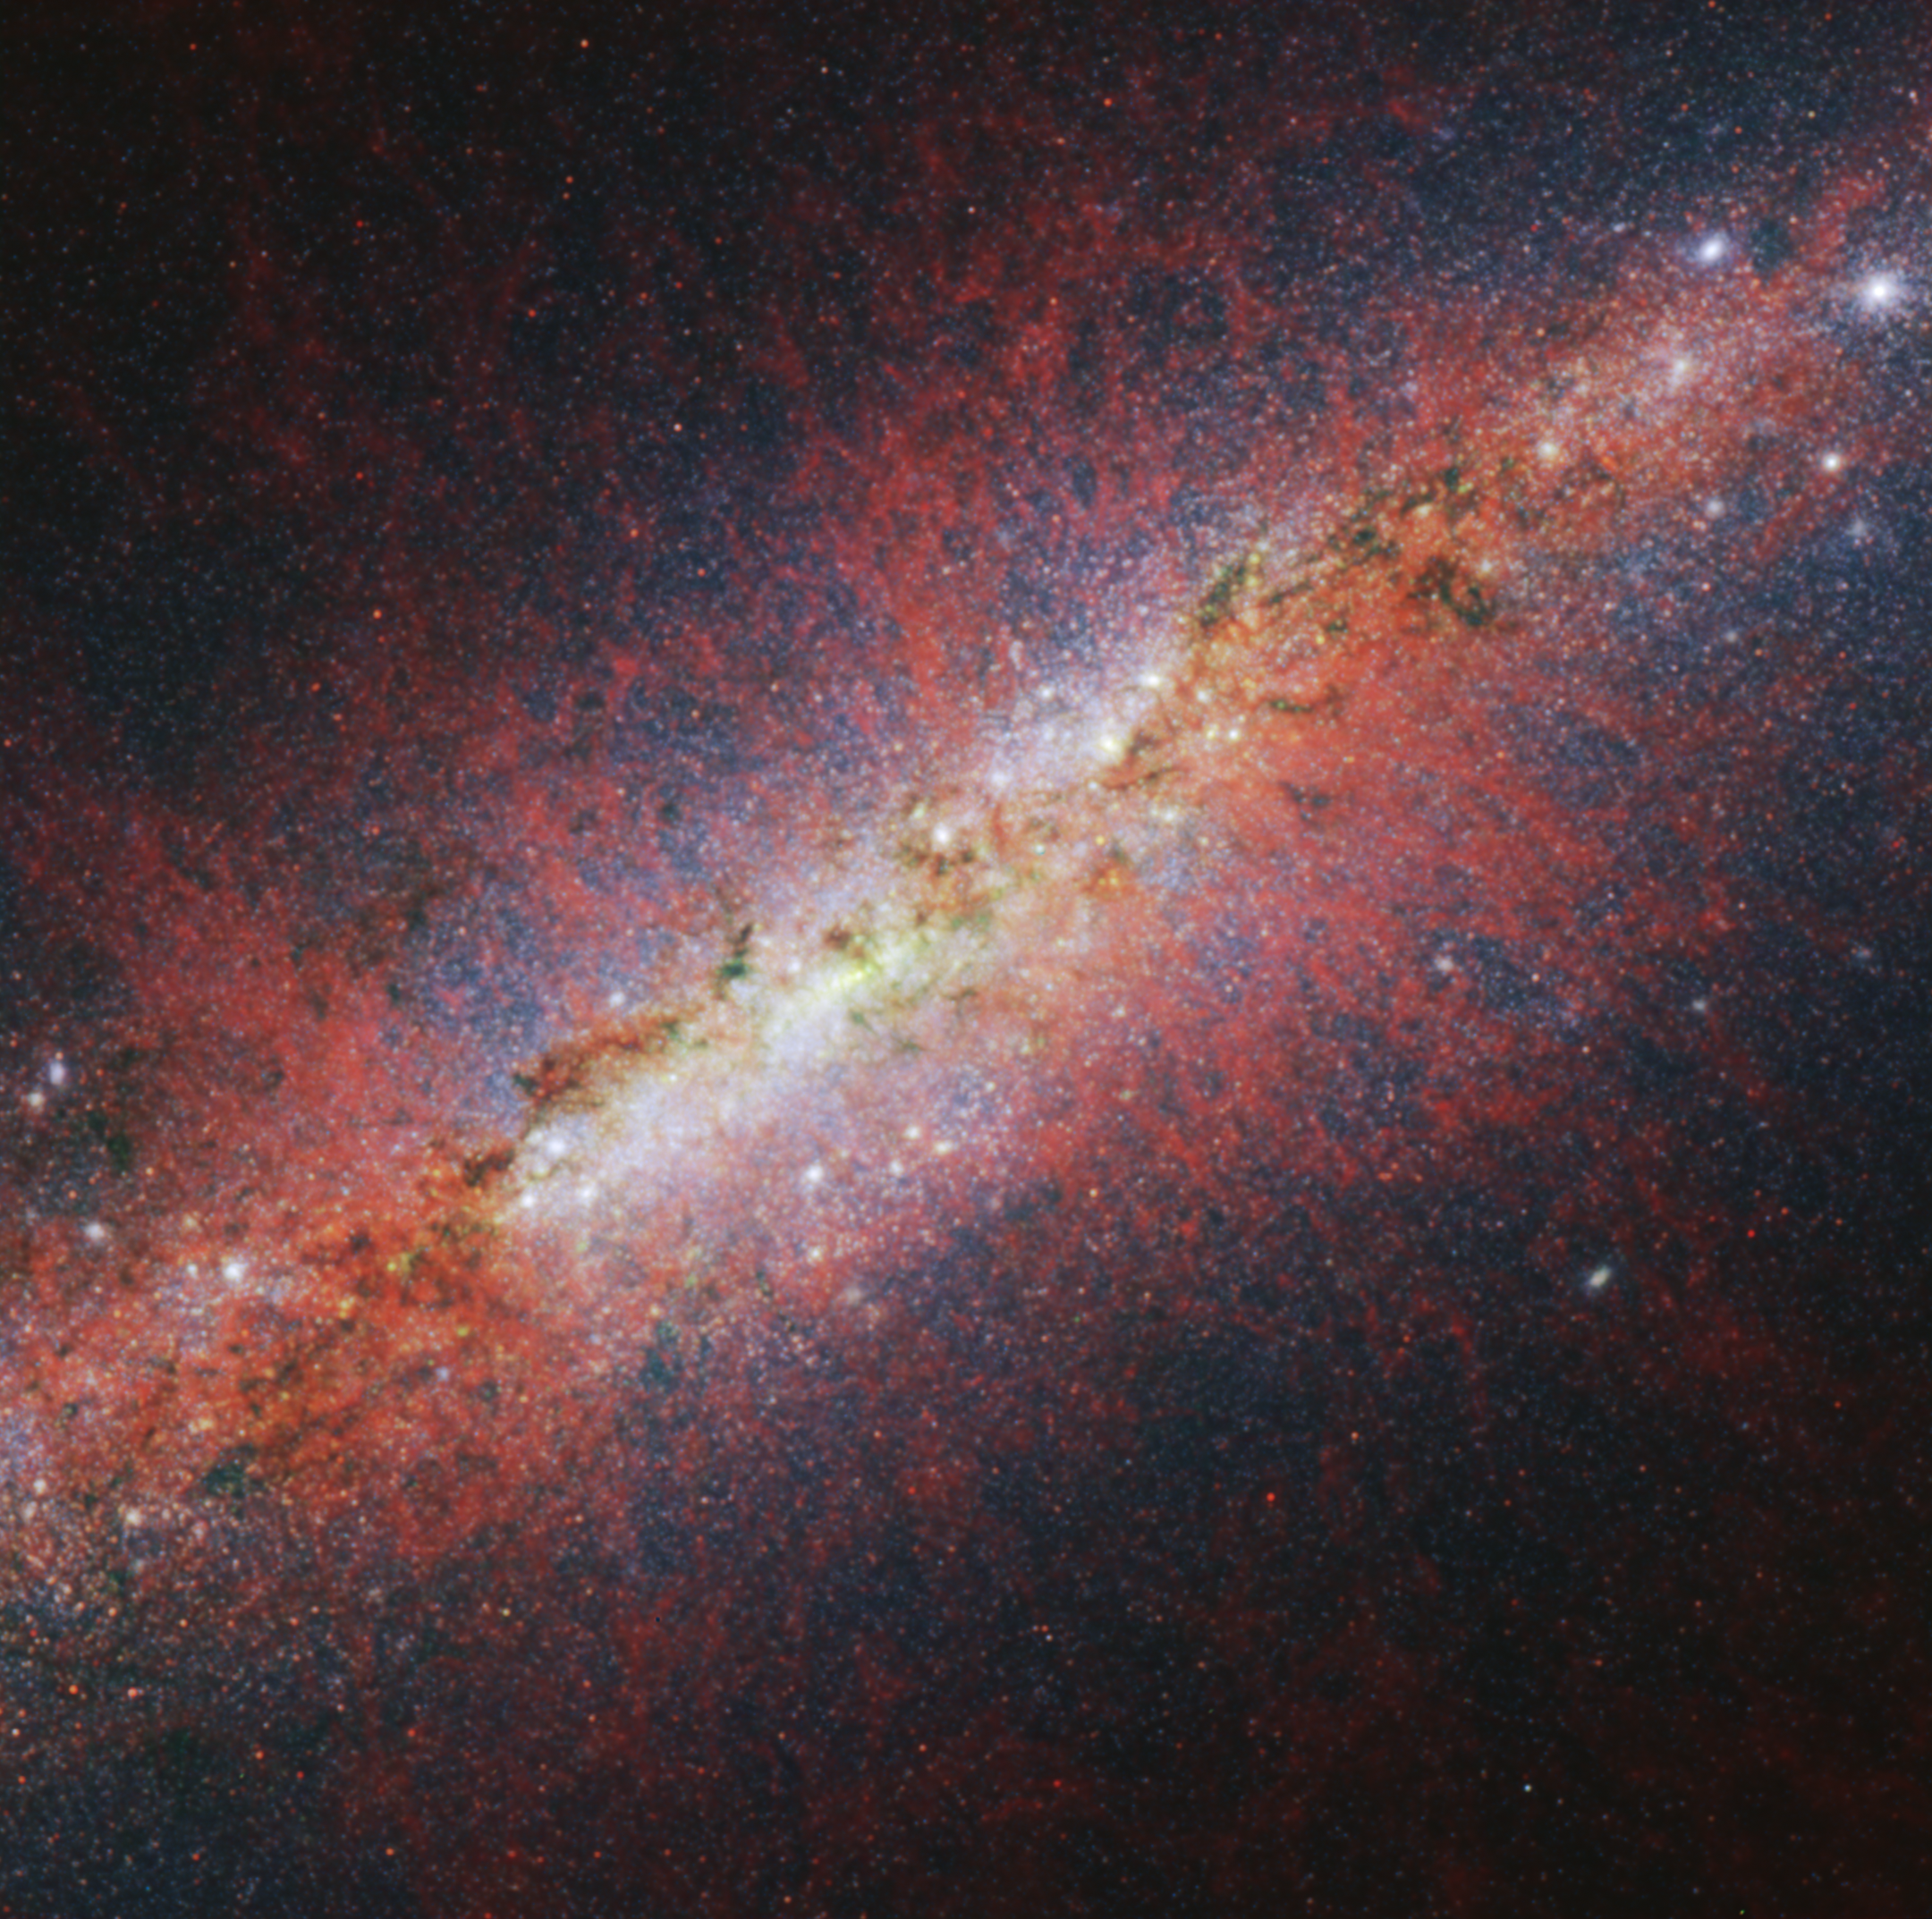

M82 (NIRCam image - longer wavelengths)

Astronomers used the NASA/ESA/CSA James Webb Space Telescope to look toward M82’s centre, where a galactic wind is being launched as a result of rapid star formation and subsequent supernovae. Studying the galactic wind can offer insight into how the loss of gas shapes the future growth of the galaxy.

This image from Webb’s NIRCam (Near-Infrared Camera) instrument shows M82’s galactic wind via emission from sooty chemical molecules known as polycyclic aromatic hydrocarbons (PAHs). PAHs are very small dust grains that survive in cooler temperatures but are destroyed in hot conditions. The structure of the emission resembles that of hot, ionised gas, suggesting PAHs may be replenished by continued ionisation of molecular gas.

In this image, light at 3.35 microns is coloured red, 2.50 microns is green, and 1.64 microns is blue (filters F335M, F250M, and F164N, respectively).

Credit: NASA, ESA, CSA, STScI, A. Bolatto (UMD)